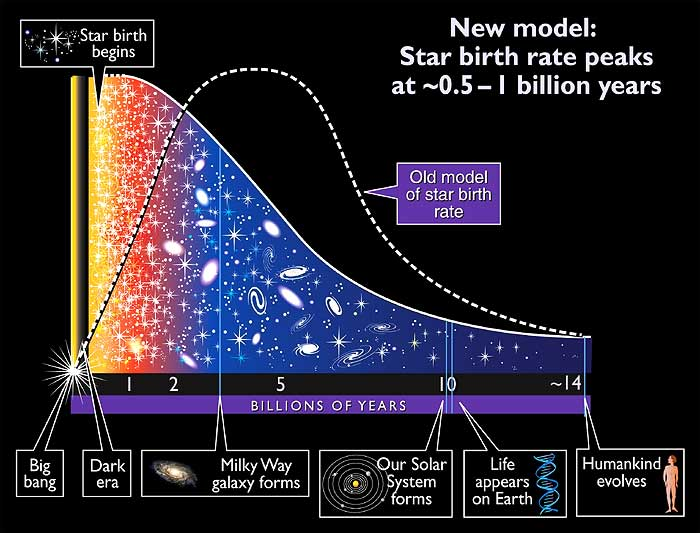

Star formation rate since the Big Bang

This illustration shows the development of the Universe from the very beginning, the Big Bang, up to the evolvement of Humankind.

Credit: A. Feild (STScI)